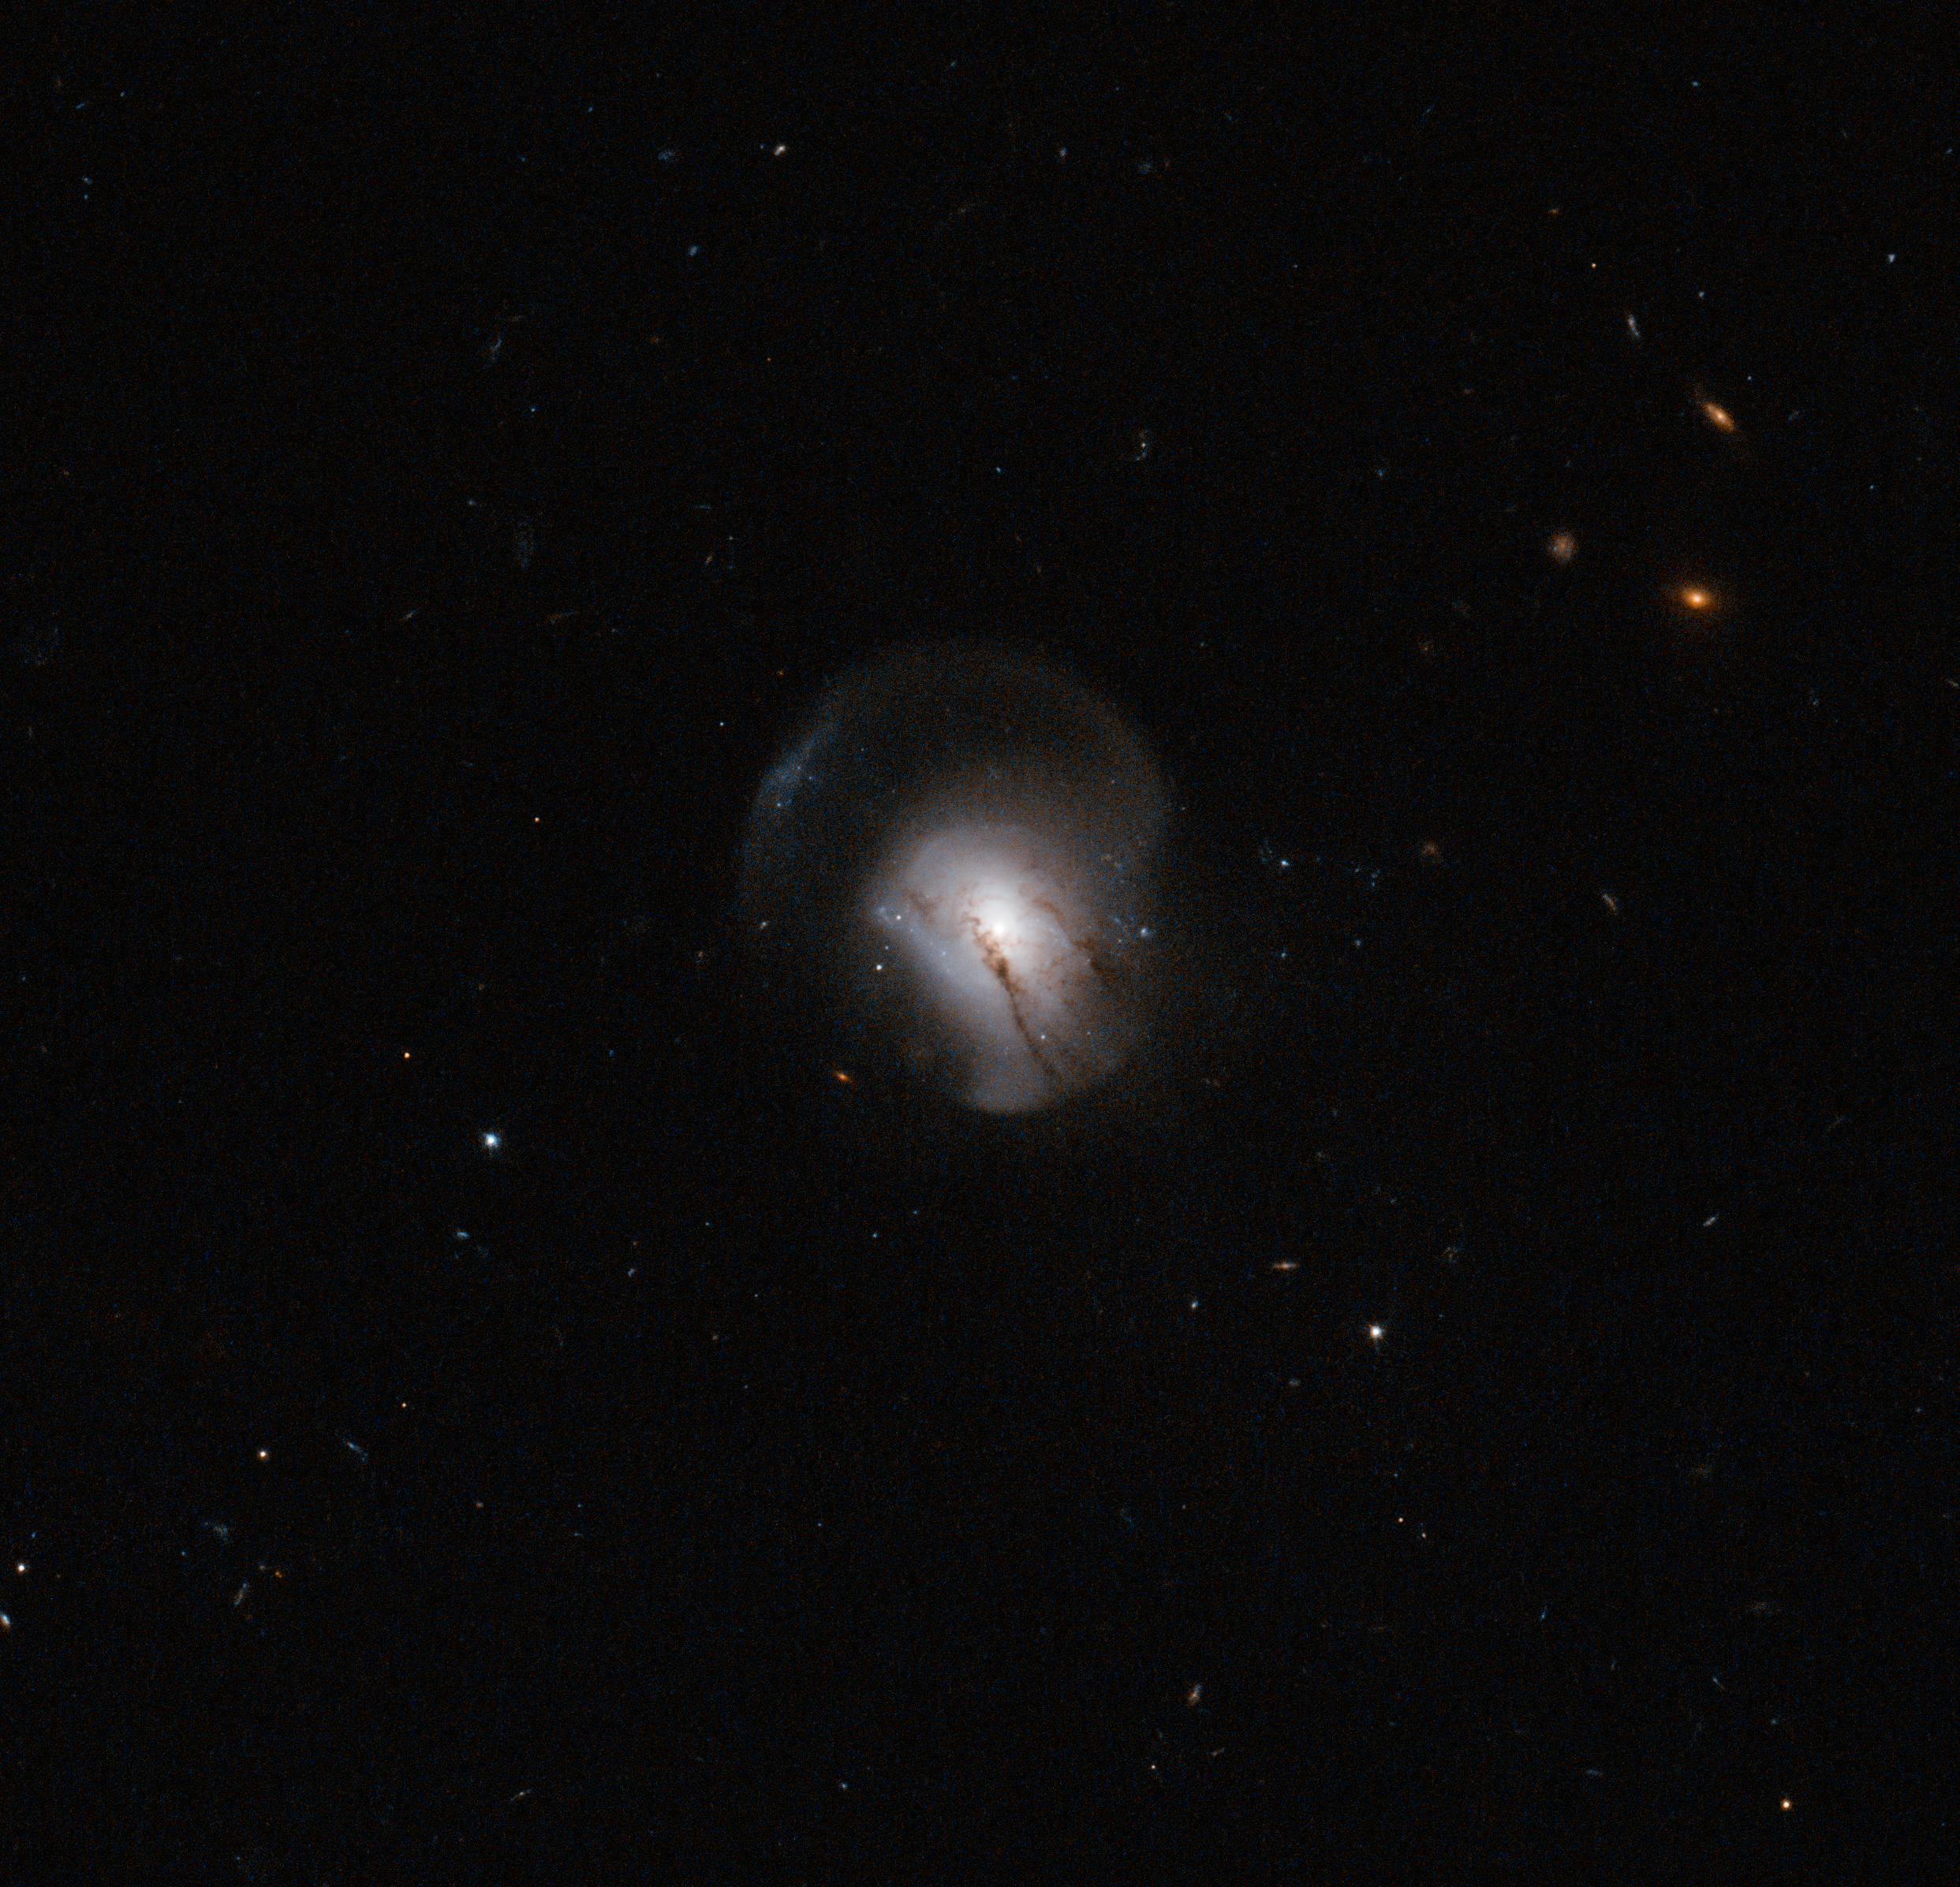

The moment the lights went out

The further away you look, the further back in time you see. Astronomers use this fact to study the evolution of the Universe by looking at nearby and more distant galaxies and comparing their features. Hubble is particularly well suited for this type of work because of its extremely high resolution and its position above the atmosphere. This has allowed it to detect many of the most distant galaxies known, as well as making detailed images of faraway objects.

Comparing galaxies in the distant past with those around us today, astronomers have noticed that the nearby galaxies are far quieter and calmer than their distant brethren, seen earlier in their lives. Nearby galaxies (although not the Milky Way) are often large, elliptical galaxies with little or no ongoing star formation, and their stars tend to be elderly and red in colour. These galaxies, in astronomers' language, are "red and dead".

This is not so for galaxies further away, which typically show more vigorous star birth.

The reason for this appears to be that as the Universe has aged, galaxies have often collided and merged together, and these events disrupt gas clouds within them. A merger will usually be a trigger for such intense star formation that the supply of gas is used up, and no more star formation occurs afterwards. The merged elliptical galaxy then creeps into old age, getting redder as its stars get older. This is expected to happen to the Milky Way when it merges with the nearby Andromeda Galaxy, some four billion years from now.

The galaxy in this image, catalogued as 2MASX J09442693+0429569, marks a transitional phase in this process as young, star-forming galaxies settle to become massive, red and dead galaxies.

The galaxy has tail-like features extending from it, typical of a galaxy that has recently undergone a merger. Studying the properties of the light from this galaxy, astronomers see no sign of ongoing star formation; in other words, the merger triggered an event which has used up all the gas. However, the observations suggest that star formation was strong until the very recent past, and has ceased only within the last billion years. This image therefore shows a snapshot of the moment star formation stopped forever in a galaxy.

A version of this image was entered into the Hidden Treasures image processing competition by contestant Nick Rose.

Credit: ESA/Hubble & NASA, Acknowledgement: A. Zabludoff, N. Rose